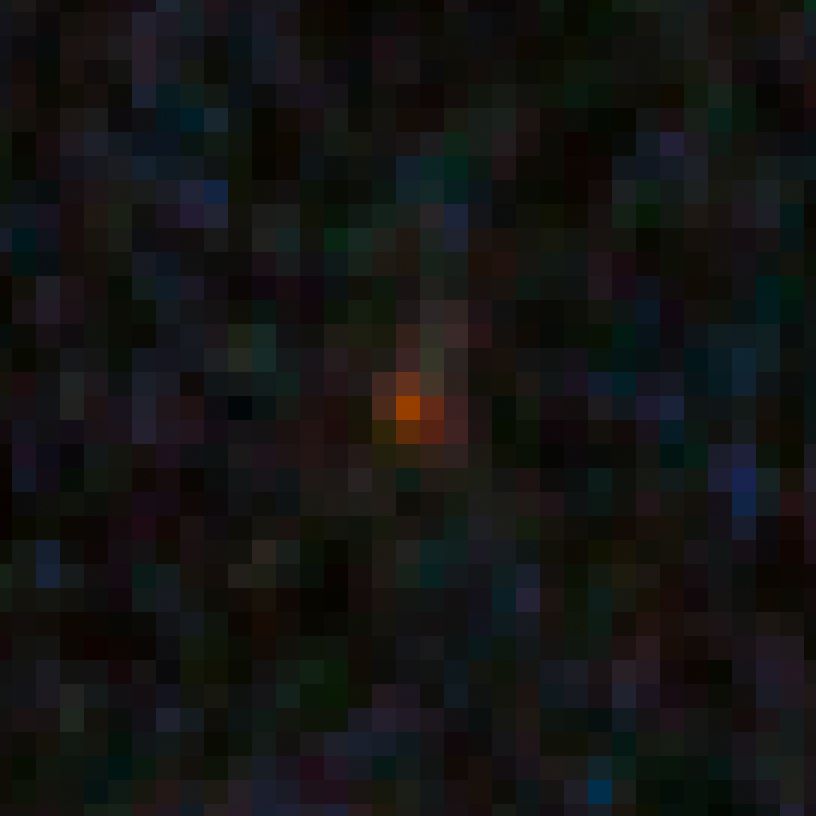

GN-z9-1 in the GOODS-N field

This image shows an ultra-bright young galaxy known as GN-z9-1, discovered in the Hubble GOODS North field (Great Observatories Origins Deep Survey).

Researchers found four unusually red objects, including GN-z9-1, that appear as they existed just 500 million years after the Big Bang. They appear red because their light has been stretched to longer infrared wavelengths by the expansion of the Universe. These extremely compact and bright galaxies present a puzzle to researchers because they are much more luminous than anything previously seen at such an early epoch. The young galaxies are bright because they are forming stars at a much faster rate than for other galaxies found at such early times.

Credit: NASA, ESA, G. Illingworth (University of California, Santa Cruz), P. Oesch (University of California, Santa Cruz; Yale University), R. Bouwens and I. Labbé (Leiden University), and the Science Team